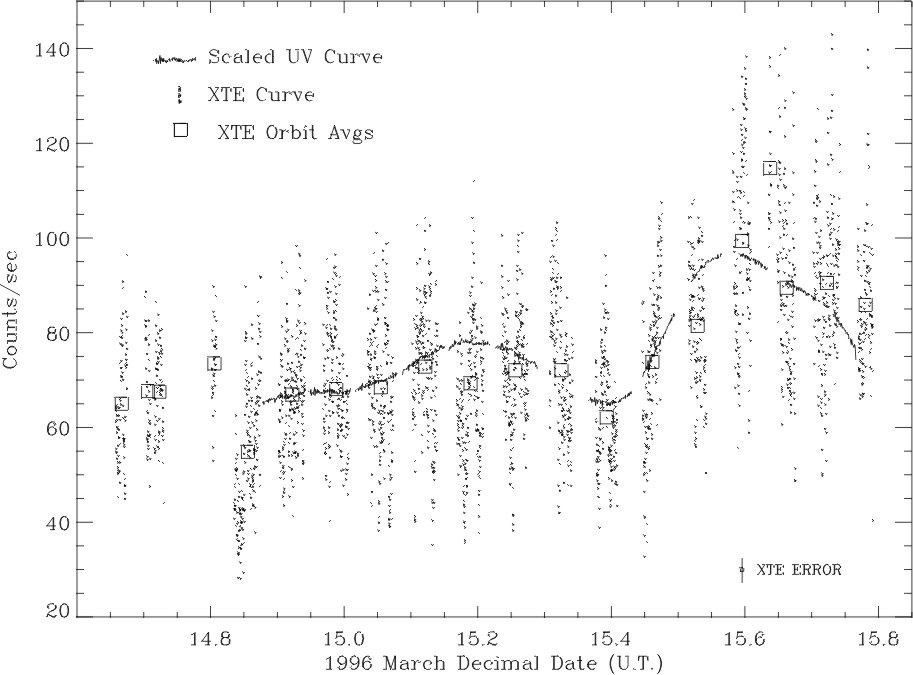

A new class Of X-ray star?

The team pointed both the Hubble Space Telescope and the Rossi X-Ray Timing Explorer at the hot star gamma Cassiopeiae, simultaneously for one full day in March, 1996 in order to understand the origin of the bright, variable X-rays coming from this star. To their surprise they discovered the X-rays are probably produced by extraordinarily hot surface flares, which are completely unexpected and unpredicted for a star of this type.

Credit: M. Smith (ST ScI) and NASA/ESA